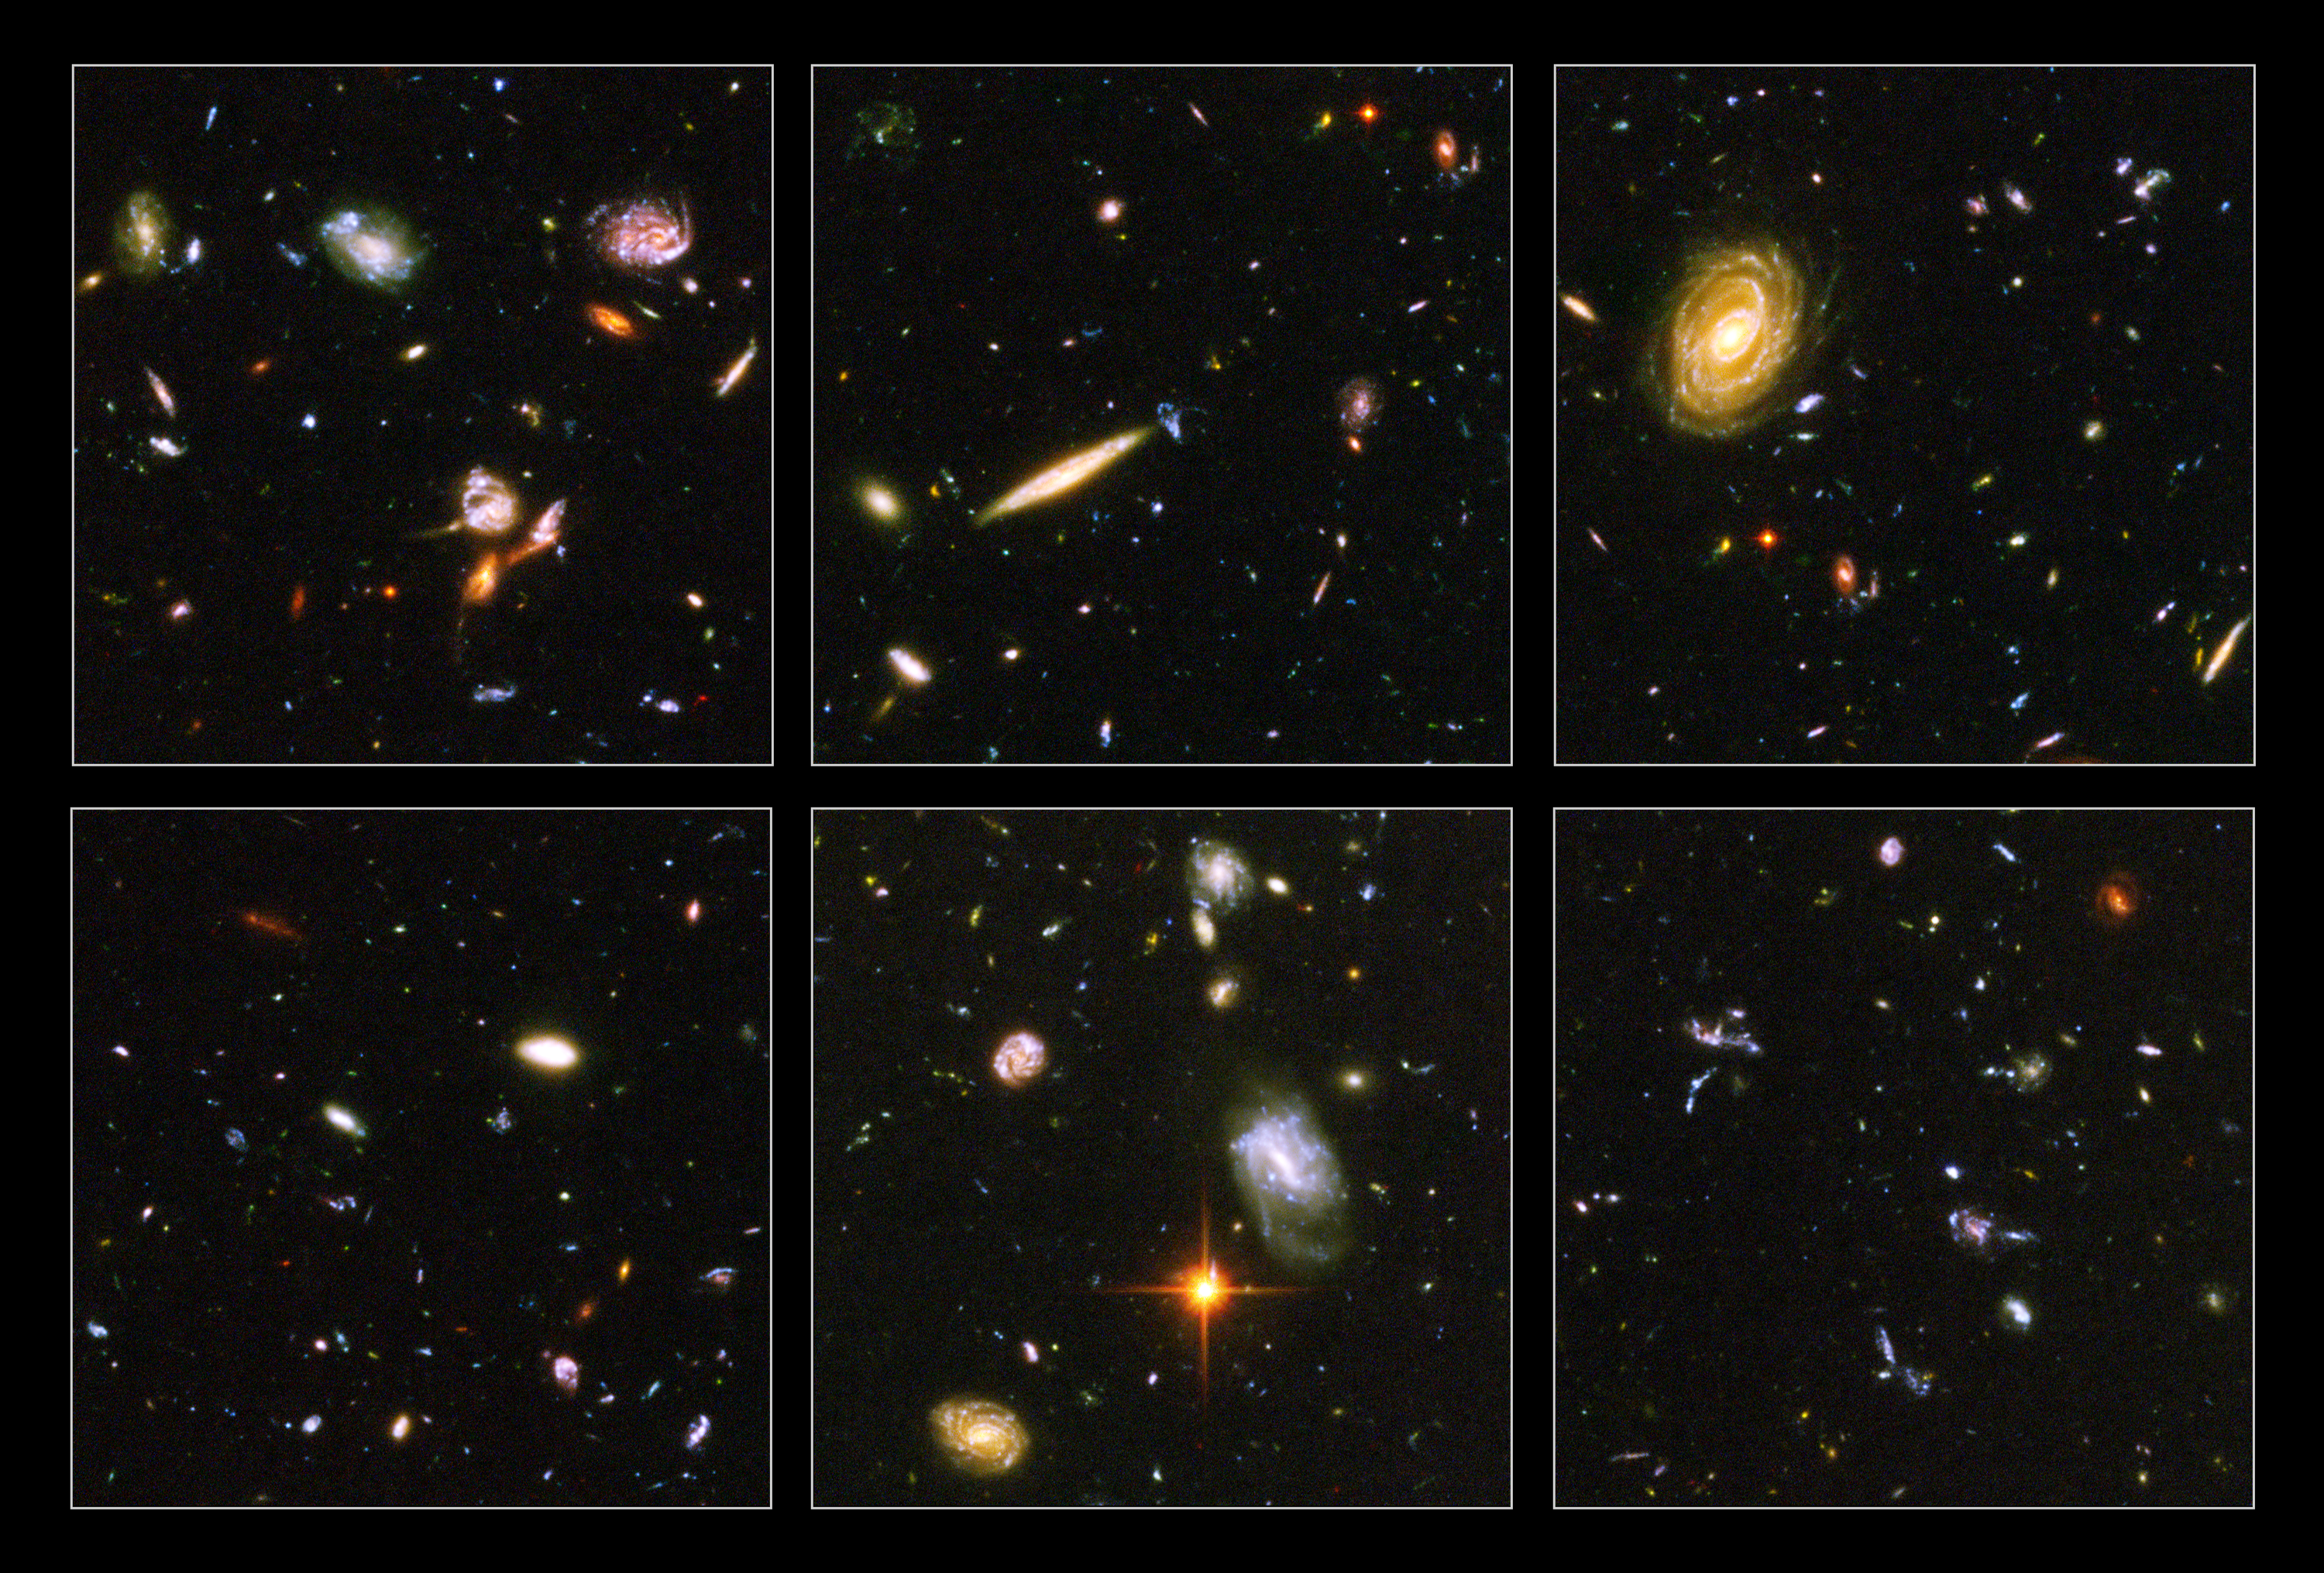

Hubble reveals galactic drama

A galactic brawl. A close encounter with a spiral galaxy. Blue wisps of galaxies. These close-up snapshots of galaxies in the Hubble Ultra Deep Field reveal the drama of galactic life.

Almost every panel shows oddball-shaped galaxies engaged in boxing matches with galactic neighbours. In the panel at top, left, three galaxies just below centre are enmeshed in battle, their shapes distorted by the brutal encounter. The panel at top, centre reveals an edge-on spiral galaxy fending off a weirdly shaped blue galaxy. The panel at bottom, right, is littered with close encounters between galaxies that have been shredded by the interactions. These oddball galaxies chronicle a period when the universe was younger and more chaotic. Order and structure were just beginning to emerge.

Not all the galaxies are engaged in galactic mayhem. In the panel at top, right, is a majestic spiral galaxy, one of the nearest galaxies in the Ultra Deep Field. This galaxy existed about 1 billion years ago, when the cosmos was 13 billion years old. The smallest, reddest galaxies [the red dots in the panels at top, left and bottom, left] may be among the most distant known, existing when the cosmos was 800 million years old.

The galaxies in these panels were plucked from a harvest of nearly 10,000 galaxies in the Ultra Deep Field, the deepest visible-light image of the cosmos.

The Ultra Deep Field observations, taken by the Advanced Camera for Surveys, represent a narrow, "deep" view of the cosmos. Peering into the Ultra Deep Field is like looking through a 2.5 metre-long soda straw.

In ground-based images, the patch of sky in which the galaxies reside (just one-tenth the diameter of the full Moon) is largely empty. Located in the constellation Fornax, the region is so empty, in fact, that only a handful of stars within the Milky Way galaxy can be seen in the image.

In this image, blue and green correspond to colours that can be seen by the human eye, such as hot, young, blue stars and the glow of Sun-like stars in the disks of galaxies. Red represents near-infrared light, which is invisible to the human eye, such as the red glow of dust-enshrouded galaxies.

The image required 800 exposures taken over the course of 400 Hubble orbits around Earth. The total amount of exposure time was 11.3 days, taken between Sept. 24, 2003 and Jan. 16, 2004.

Credit: NASA, ESA, and S. Beckwith (STScI) and the HUDF Team